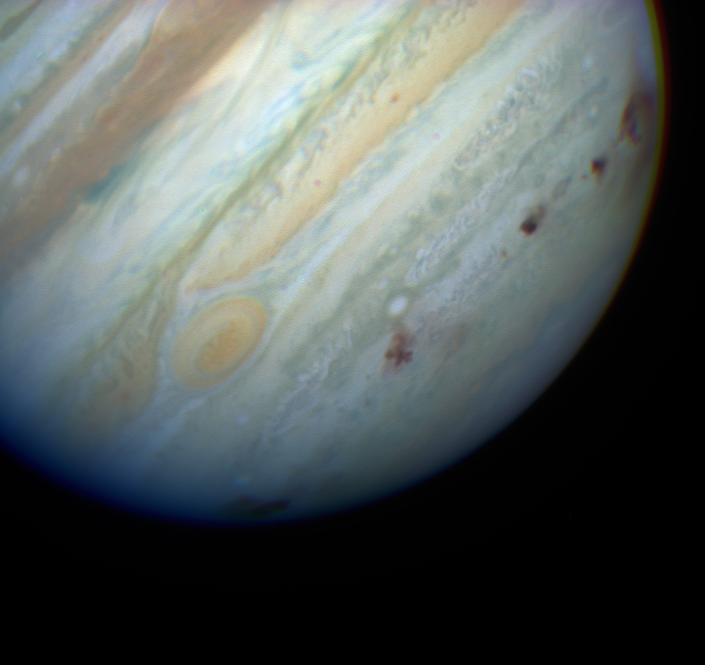

True colour Image of Multiple Impact Zones

Image of Jupiter with NASA/ESA Hubble Space Telescope's Planetary Camera. Eight impact sites are visible. From left to right are the E/F complex (barely visible on the edge of the planet), the star-shaped H site, the impact sites for tiny N, Q1, small Q2, and R, and on the far right limb the D/G complex. The D/G complex also shows extended haze at the edge of the planet. The features are rapidly evolving on timescales of days. The smallest features in this image are less than 200 kilometers across. This image is a colour composite from three filters at 9530, 5550, and 4100 Angstroms.

Credit: Hubble Space Telescope Comet Team and NASA/ESA